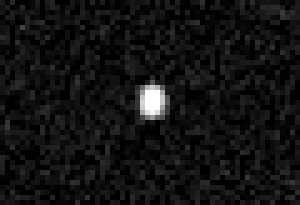

Quaoar Close-Up

This photograph, taken by Hubble's Advanced Camera for Surveys, is a close-up view of the icy world. Only Hubble's sharp vision can resolve the disk of this distant world, leading to the first-ever direct measurement of the true size of a Kuiper belt object. Quaoar's diameter is about 800 miles (1300 kilometers).

It is the farthest object in the solar system ever to be resolved by a telescope. The Hubble photo does not show details of Quaoar's icy surface because the object is too far away. Quaoar is about 4 billion miles (6.5 billion kilometers) from Earth, more than 1 billion miles farther than Pluto. The photograph was made by assembling 16 pictures of the object. Observations were made July 5, 2002 and Aug. 1, 2002.

Credit: NASA/ESA and M. Brown (Caltech)